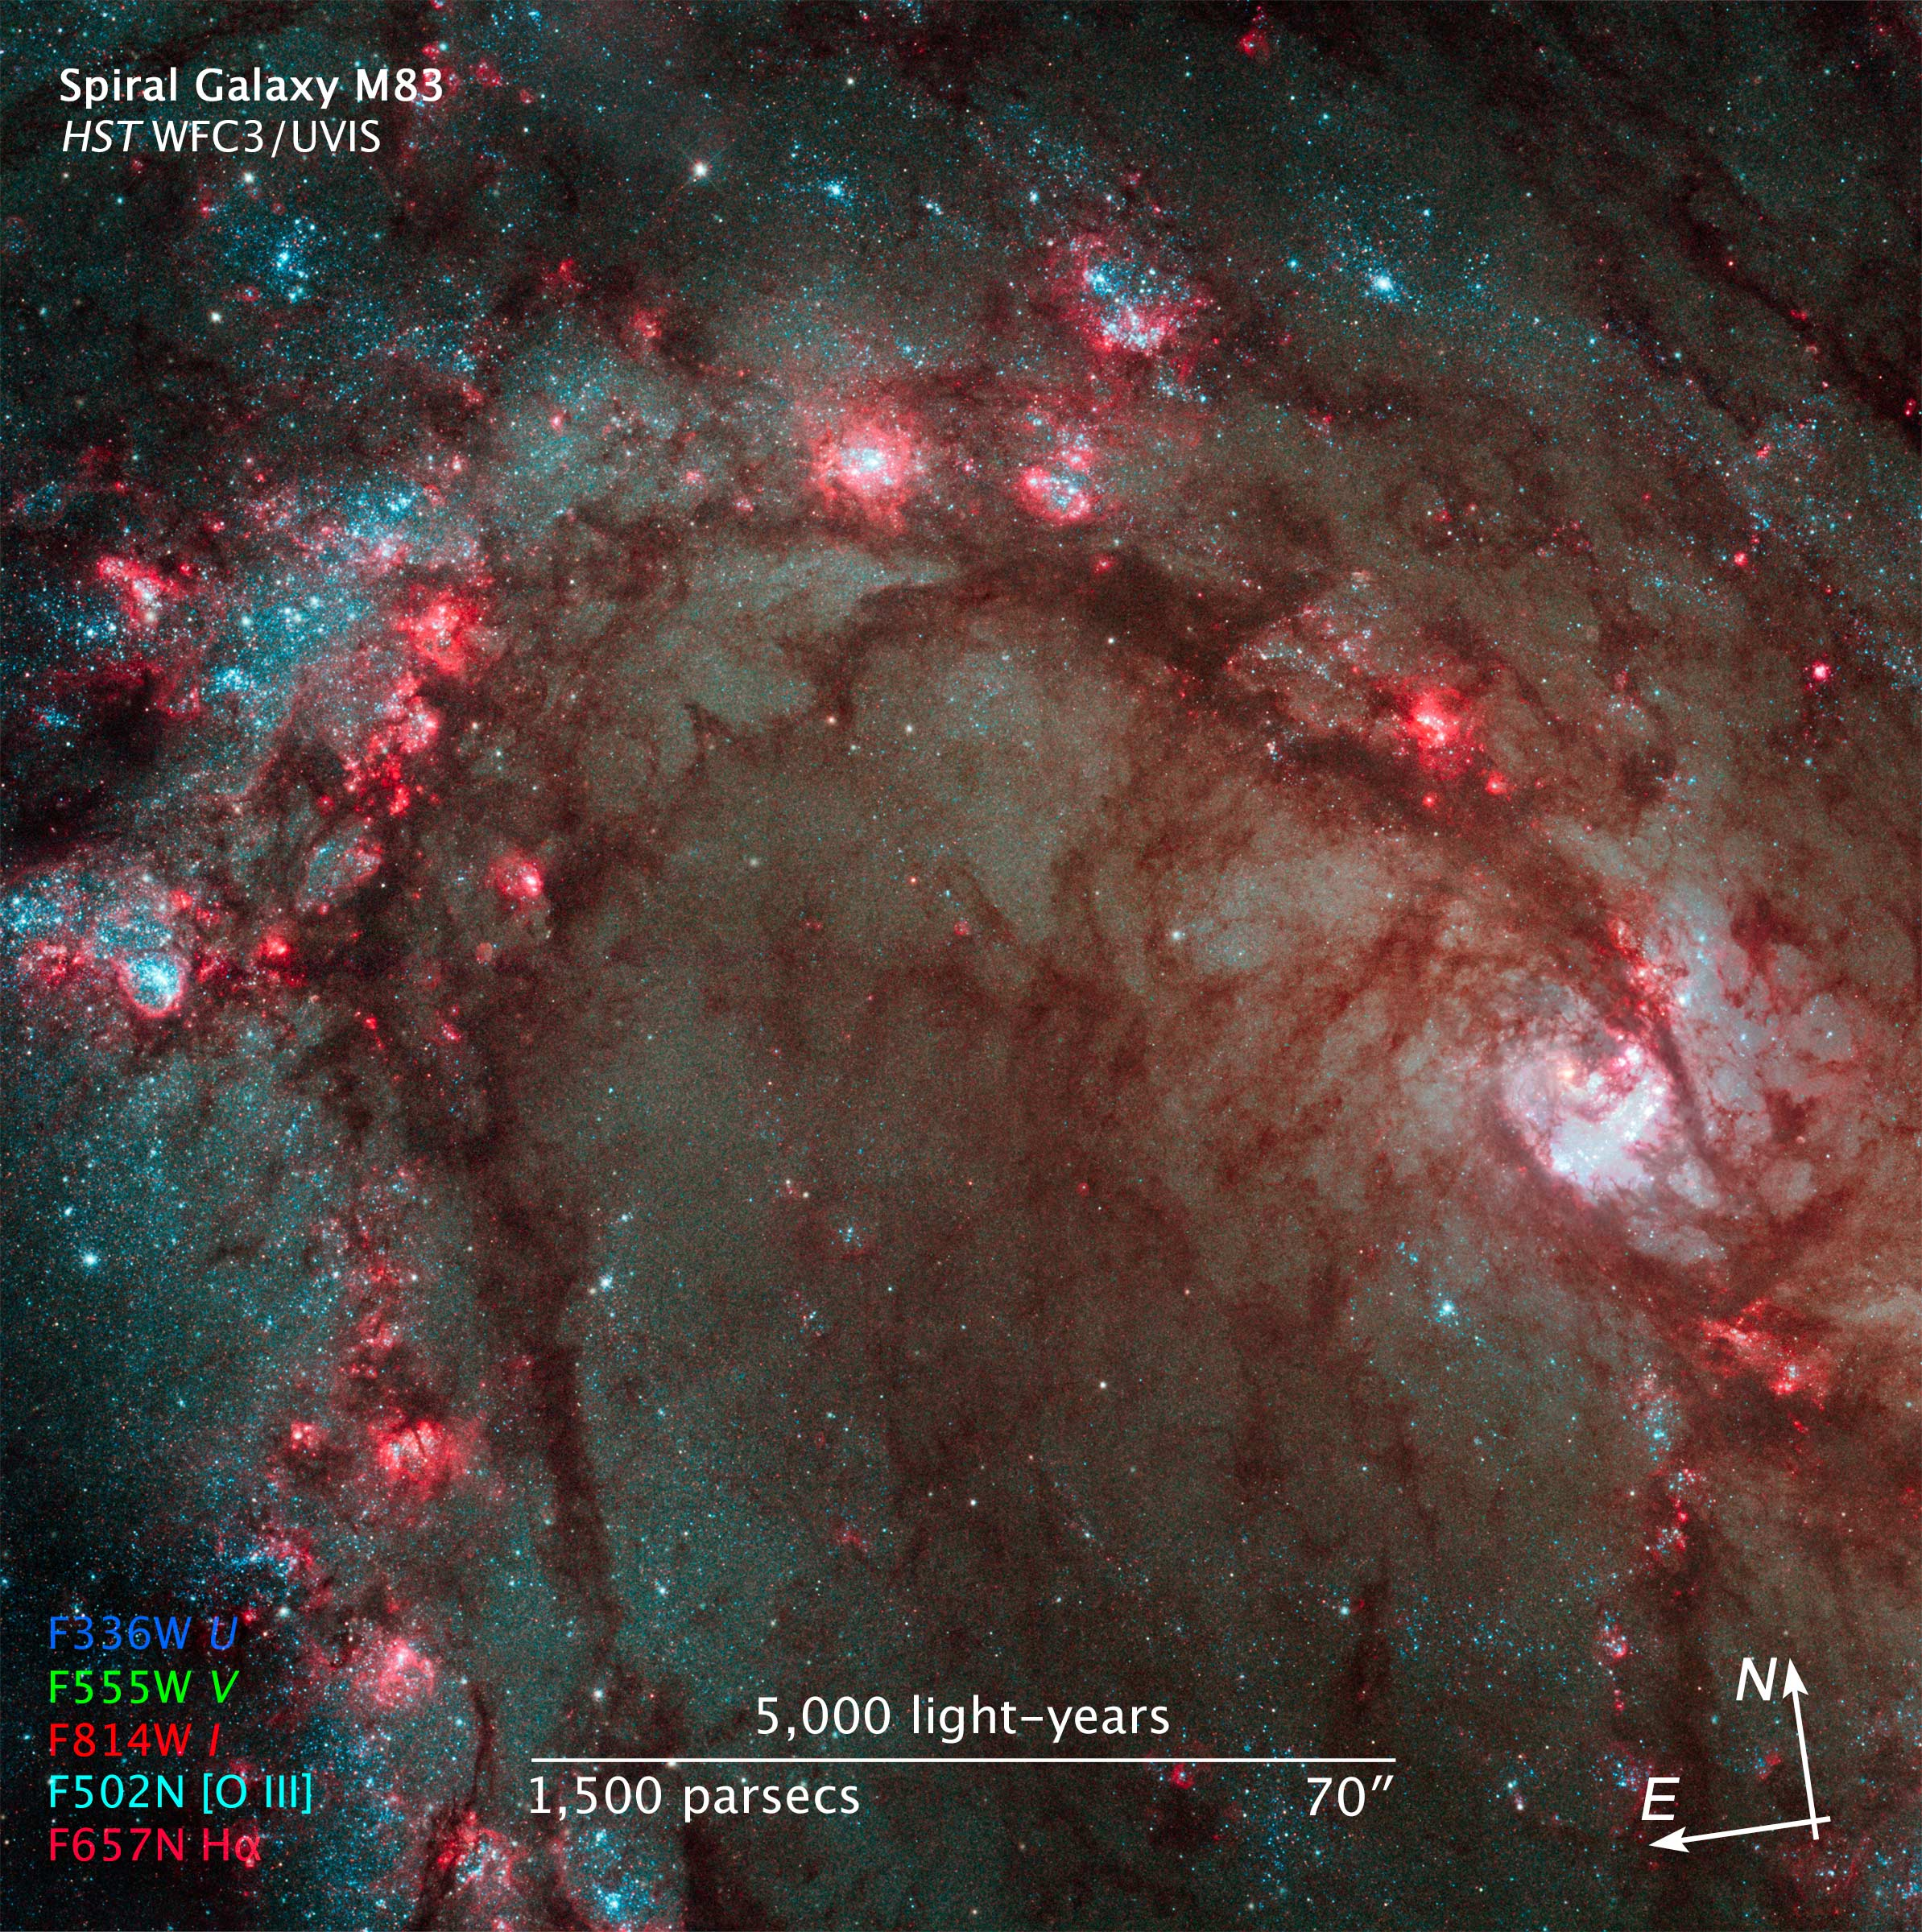

Compass and scale image of M83

Compass and Scale Image of M83.

Credit: NASA, ESA and Z. Levay (STScI)